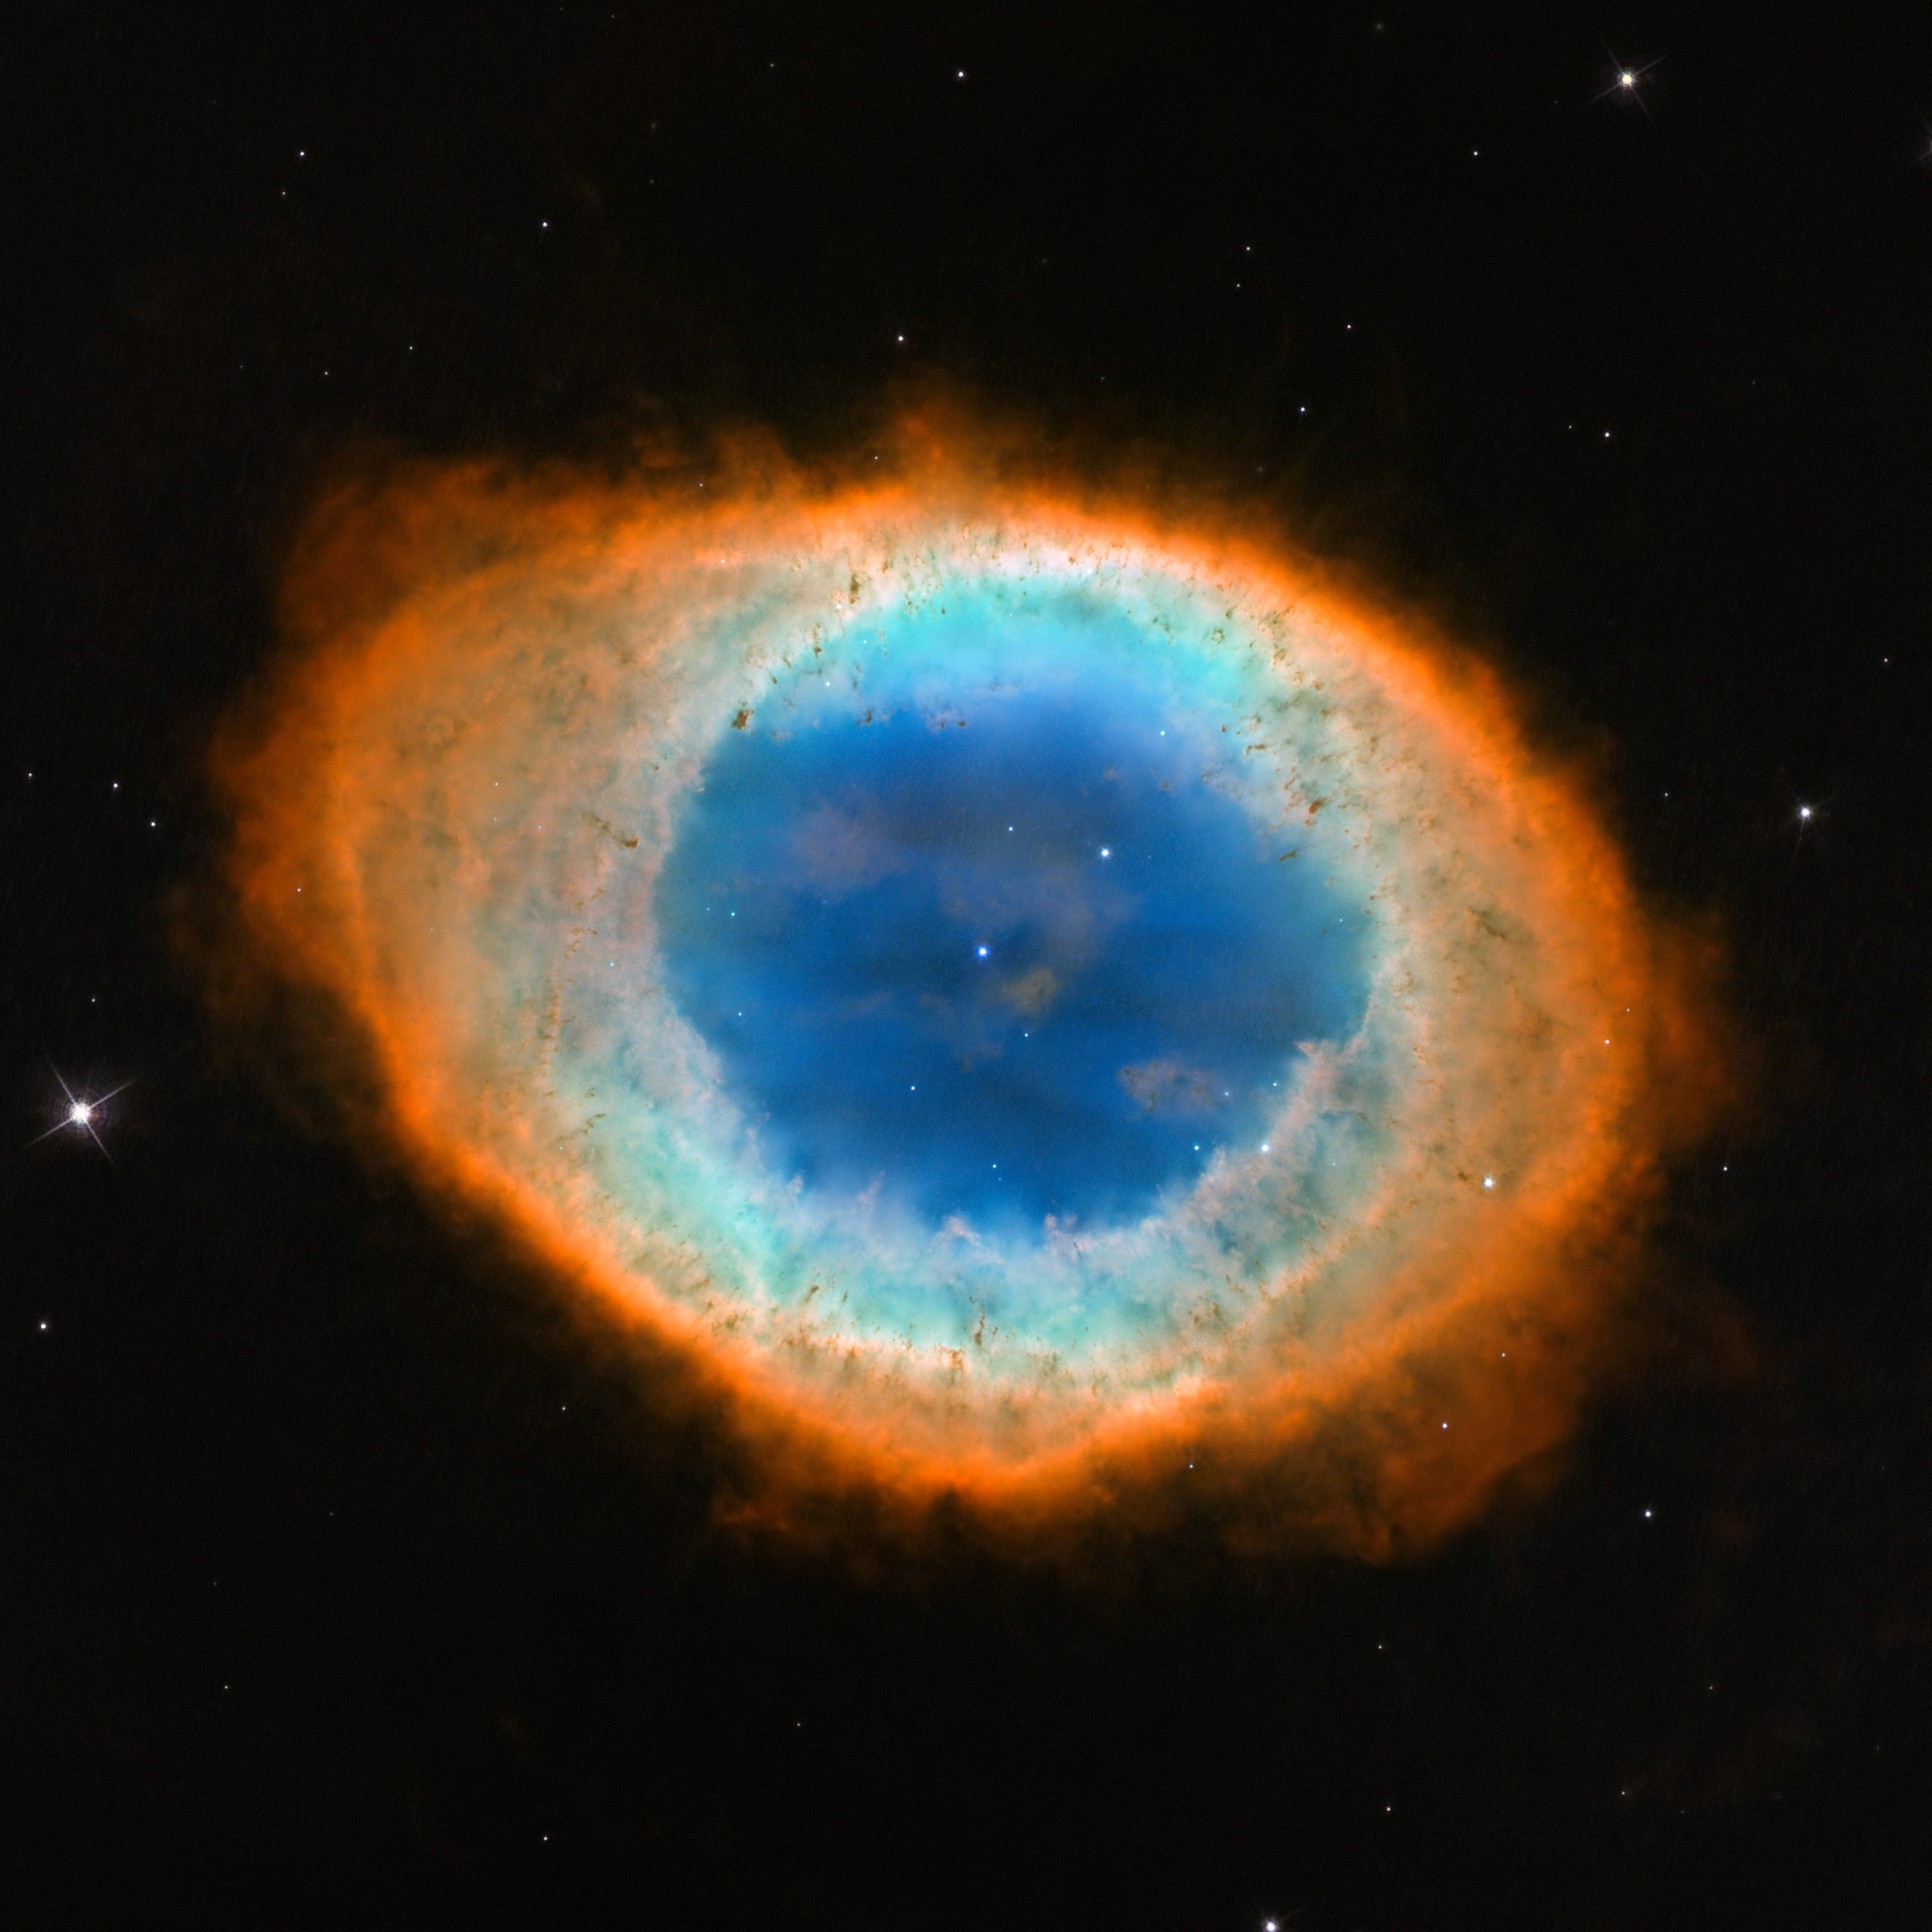

Hubble image of the Ring Nebula (Messier 57)

This new image shows the dramatic shape and colour of the Ring Nebula, otherwise known as Messier 57.

From Earth’s perspective, the nebula looks like a simple elliptical shape with a shaggy boundary. However, new observations combining existing ground-based data with new NASA/ESA Hubble Space Telescope data show that the nebula is shaped like a distorted doughnut. This doughnut has a rugby-ball-shaped region of lower-density material slotted into in its central “gap”, stretching towards and away from us.

Credit: NASA, ESA, and C. Robert O’Dell (Vanderbilt University).